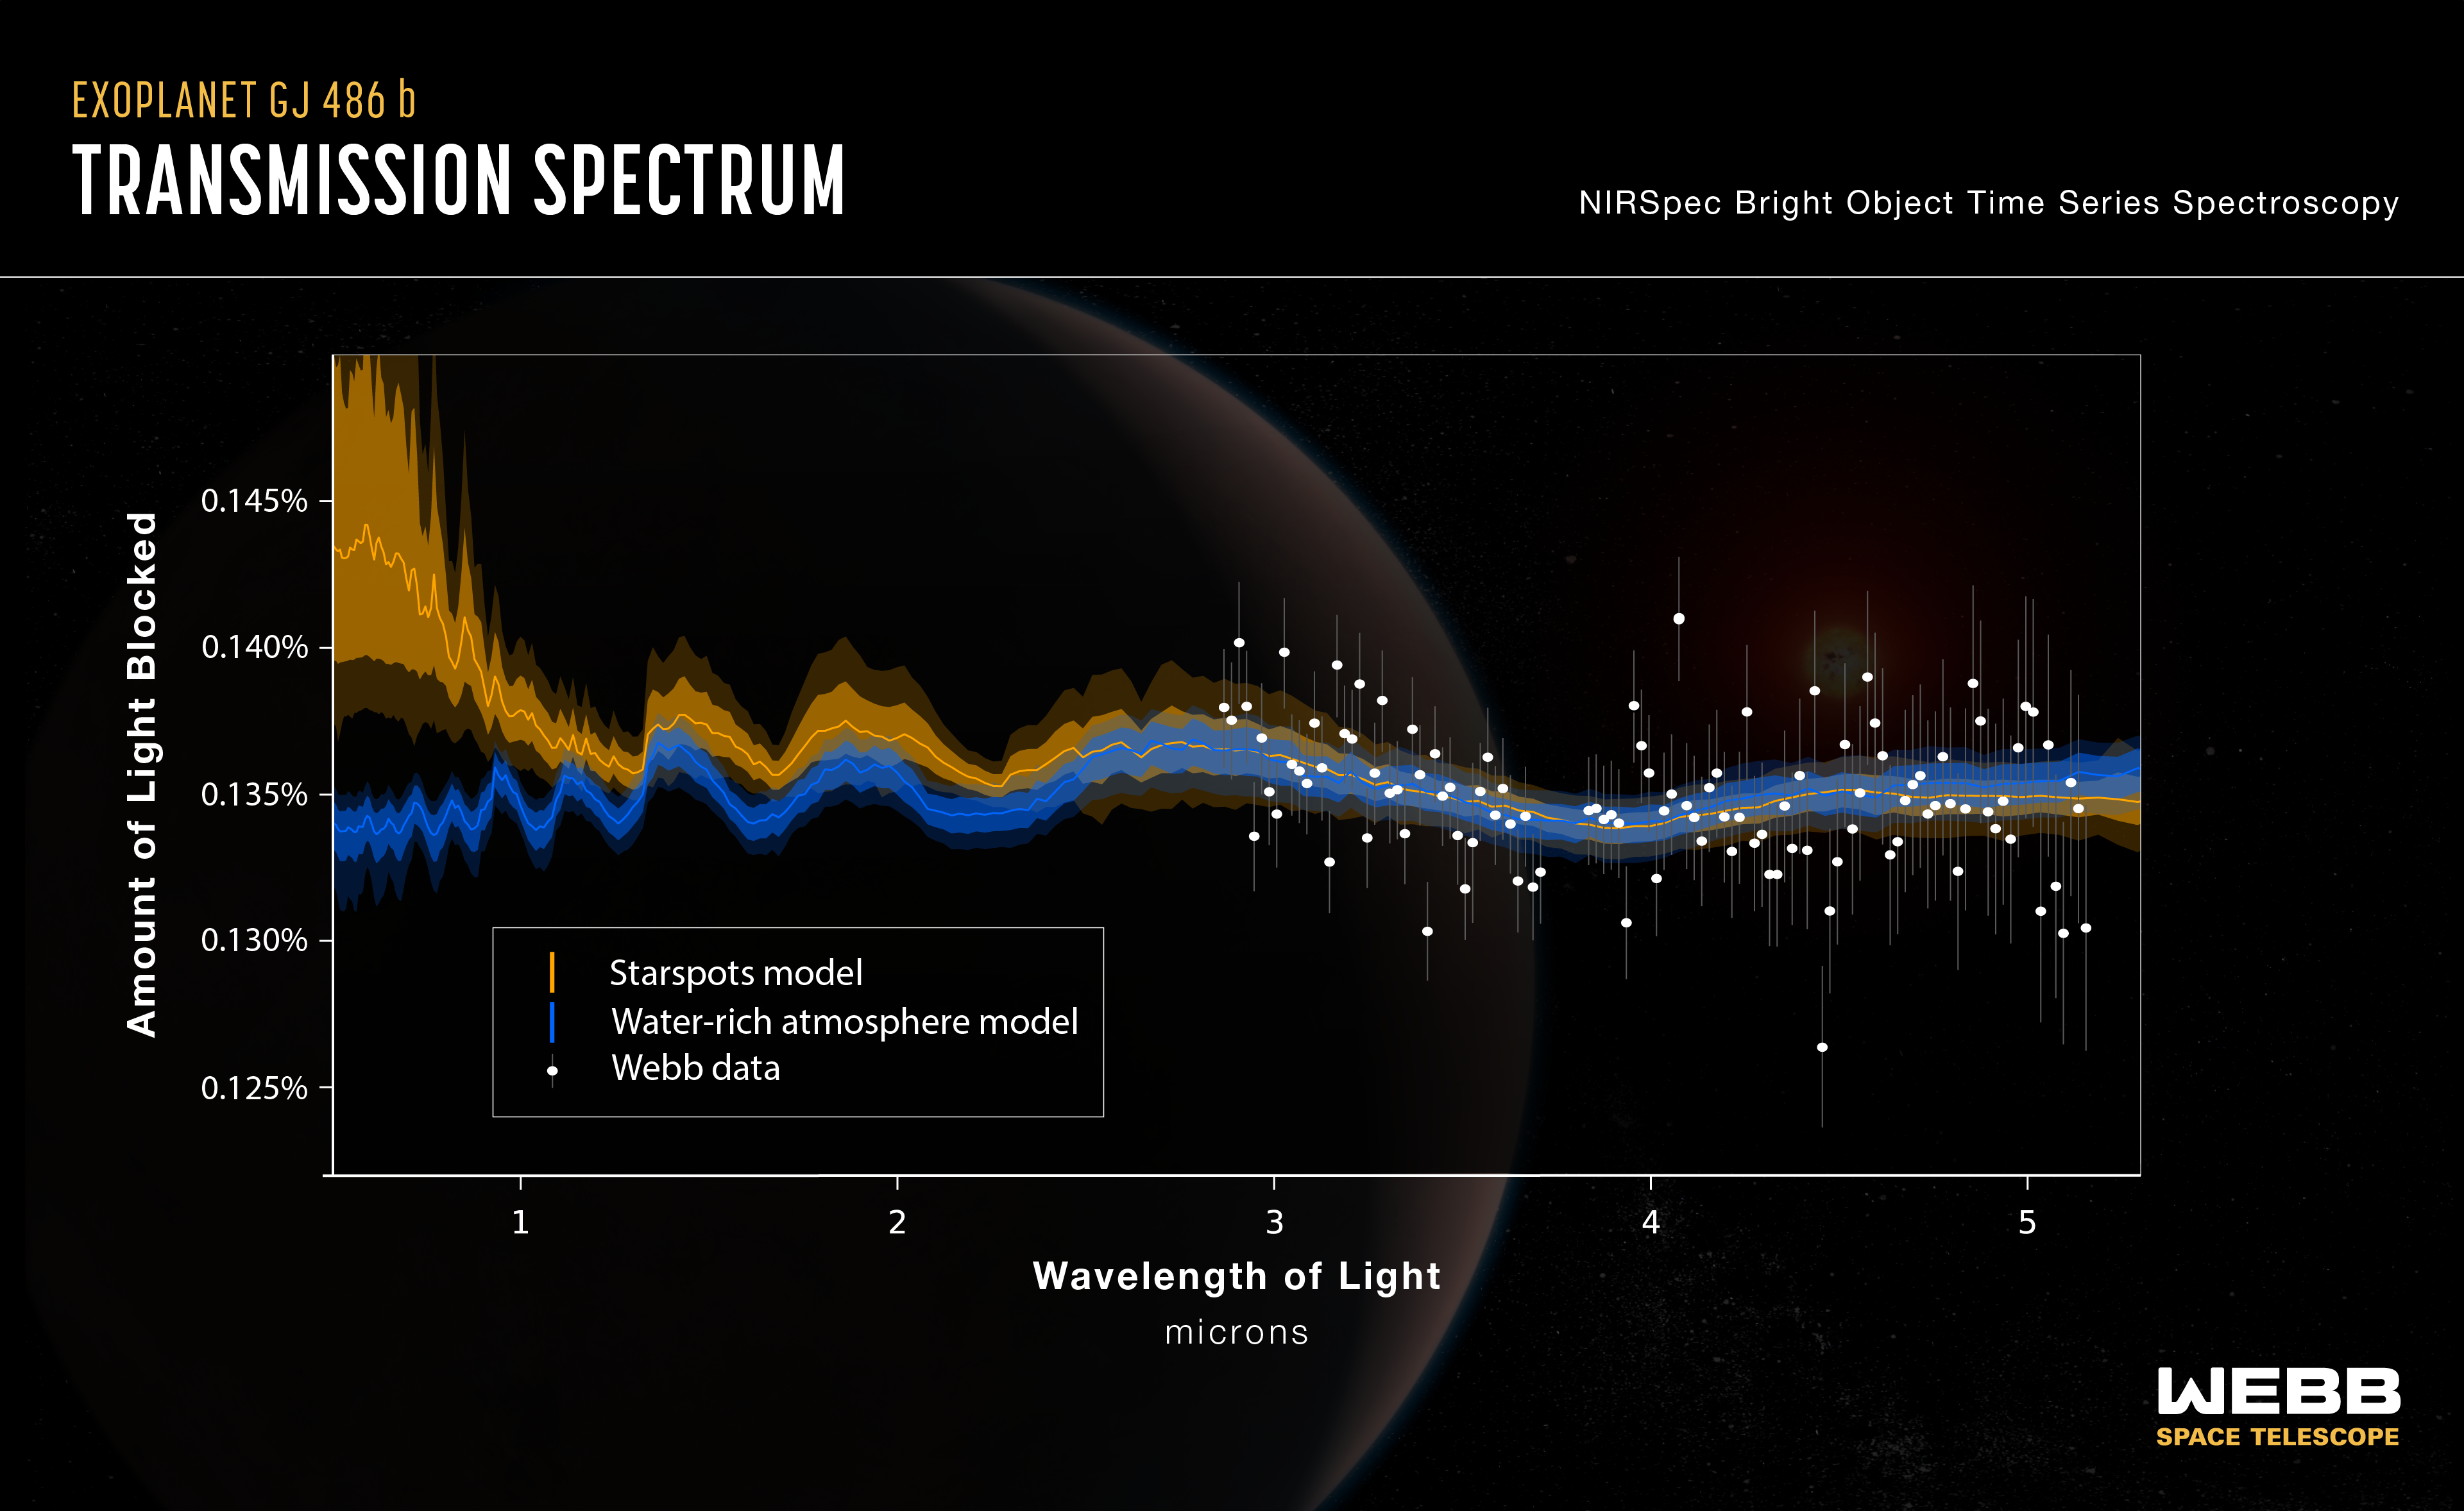

Webb finds water vapour, but from a rocky planet or its star?

Astronomers used the NASA/ESA/CSA James Webb Space Telescope to study a rocky exoplanet known as GJ 486 b. It is too close to its star to be within the habitable zone, with a surface temperature of about 430 degrees Celsius. And yet, their observations using Webb’s Near-Infrared Spectrograph (NIRSpec) show hints of water vapour. If the water vapour is associated with the planet, that would indicate that it has an atmosphere despite its scorching temperature and close proximity to its star. Water vapour has been seen on gaseous exoplanets before, but to date no atmosphere has been detected around a rocky exoplanet. However, the team cautions that the water vapour could be on the star itself – specifically, cool starspots – and not from the planet at all.

This graphic shows the transmission spectrum obtained by Webb observations of rocky exoplanet GJ 486 b. The science team’s analysis shows hints of water vapour; however, computer models show that the signal could be from a water-rich planetary atmosphere (indicated by the blue line) or from starspots from the red dwarf host star (indicated by the yellow line). The two models diverge noticeably at shorter infrared wavelengths, indicating that additional observations with other Webb instruments will be needed to constrain the source of the water signal. The background illustration of a planet is an artist concept. Webb has not taken an image of the planet.

GJ 486 b is about 30% larger than the Earth and three times as massive, which means it is a rocky world with stronger gravity than Earth. It orbits a red dwarf star once every two Earth days. It is expected to be tidally locked, with a permanent day side and a permanent night side. While the water vapour could potentially indicate the presence of an atmosphere on GJ 486 b, an equally plausible explanation is water vapour from the star. The planet’s host star is cool enough that water vapour can exist in its photosphere. Since starspots (like sunspots on our Sun) are cooler than the surrounding area, the water vapour would concentrate there. As a result, it could create a signal that mimics a planetary atmosphere. If an atmosphere is present, it would likely have to be constantly replenished by volcanoes ejecting steam from the planet’s interior. If the water is indeed in the planet’s atmosphere, additional observations are needed to narrow down how much water is present.

Future Webb observations may shed more light on this system. An upcoming program will use the Mid-Infrared Instrument (MIRI) to observe the planet’s day side. If the planet has no atmosphere, or only a thin atmosphere, then the hottest part of the day side is expected to be directly under the star. However, if the hottest point is shifted, that would indicate an atmosphere that can circulate heat.

Ultimately, observations at shorter infrared wavelengths by another Webb instrument, the Near-Infrared Imager and Slitless Spectrograph (NIRISS), will be needed to differentiate between the planetary atmosphere and starspot scenarios.

Credit: NASA, ESA, CSA, and J. Olmsted (STScI), S. Moran (Univ. of Arizona), K. Stevenson (JHUAPL), R. MacDonald (Univ. of Michigan), J. Lustig-Yaeger (JHUAPL)